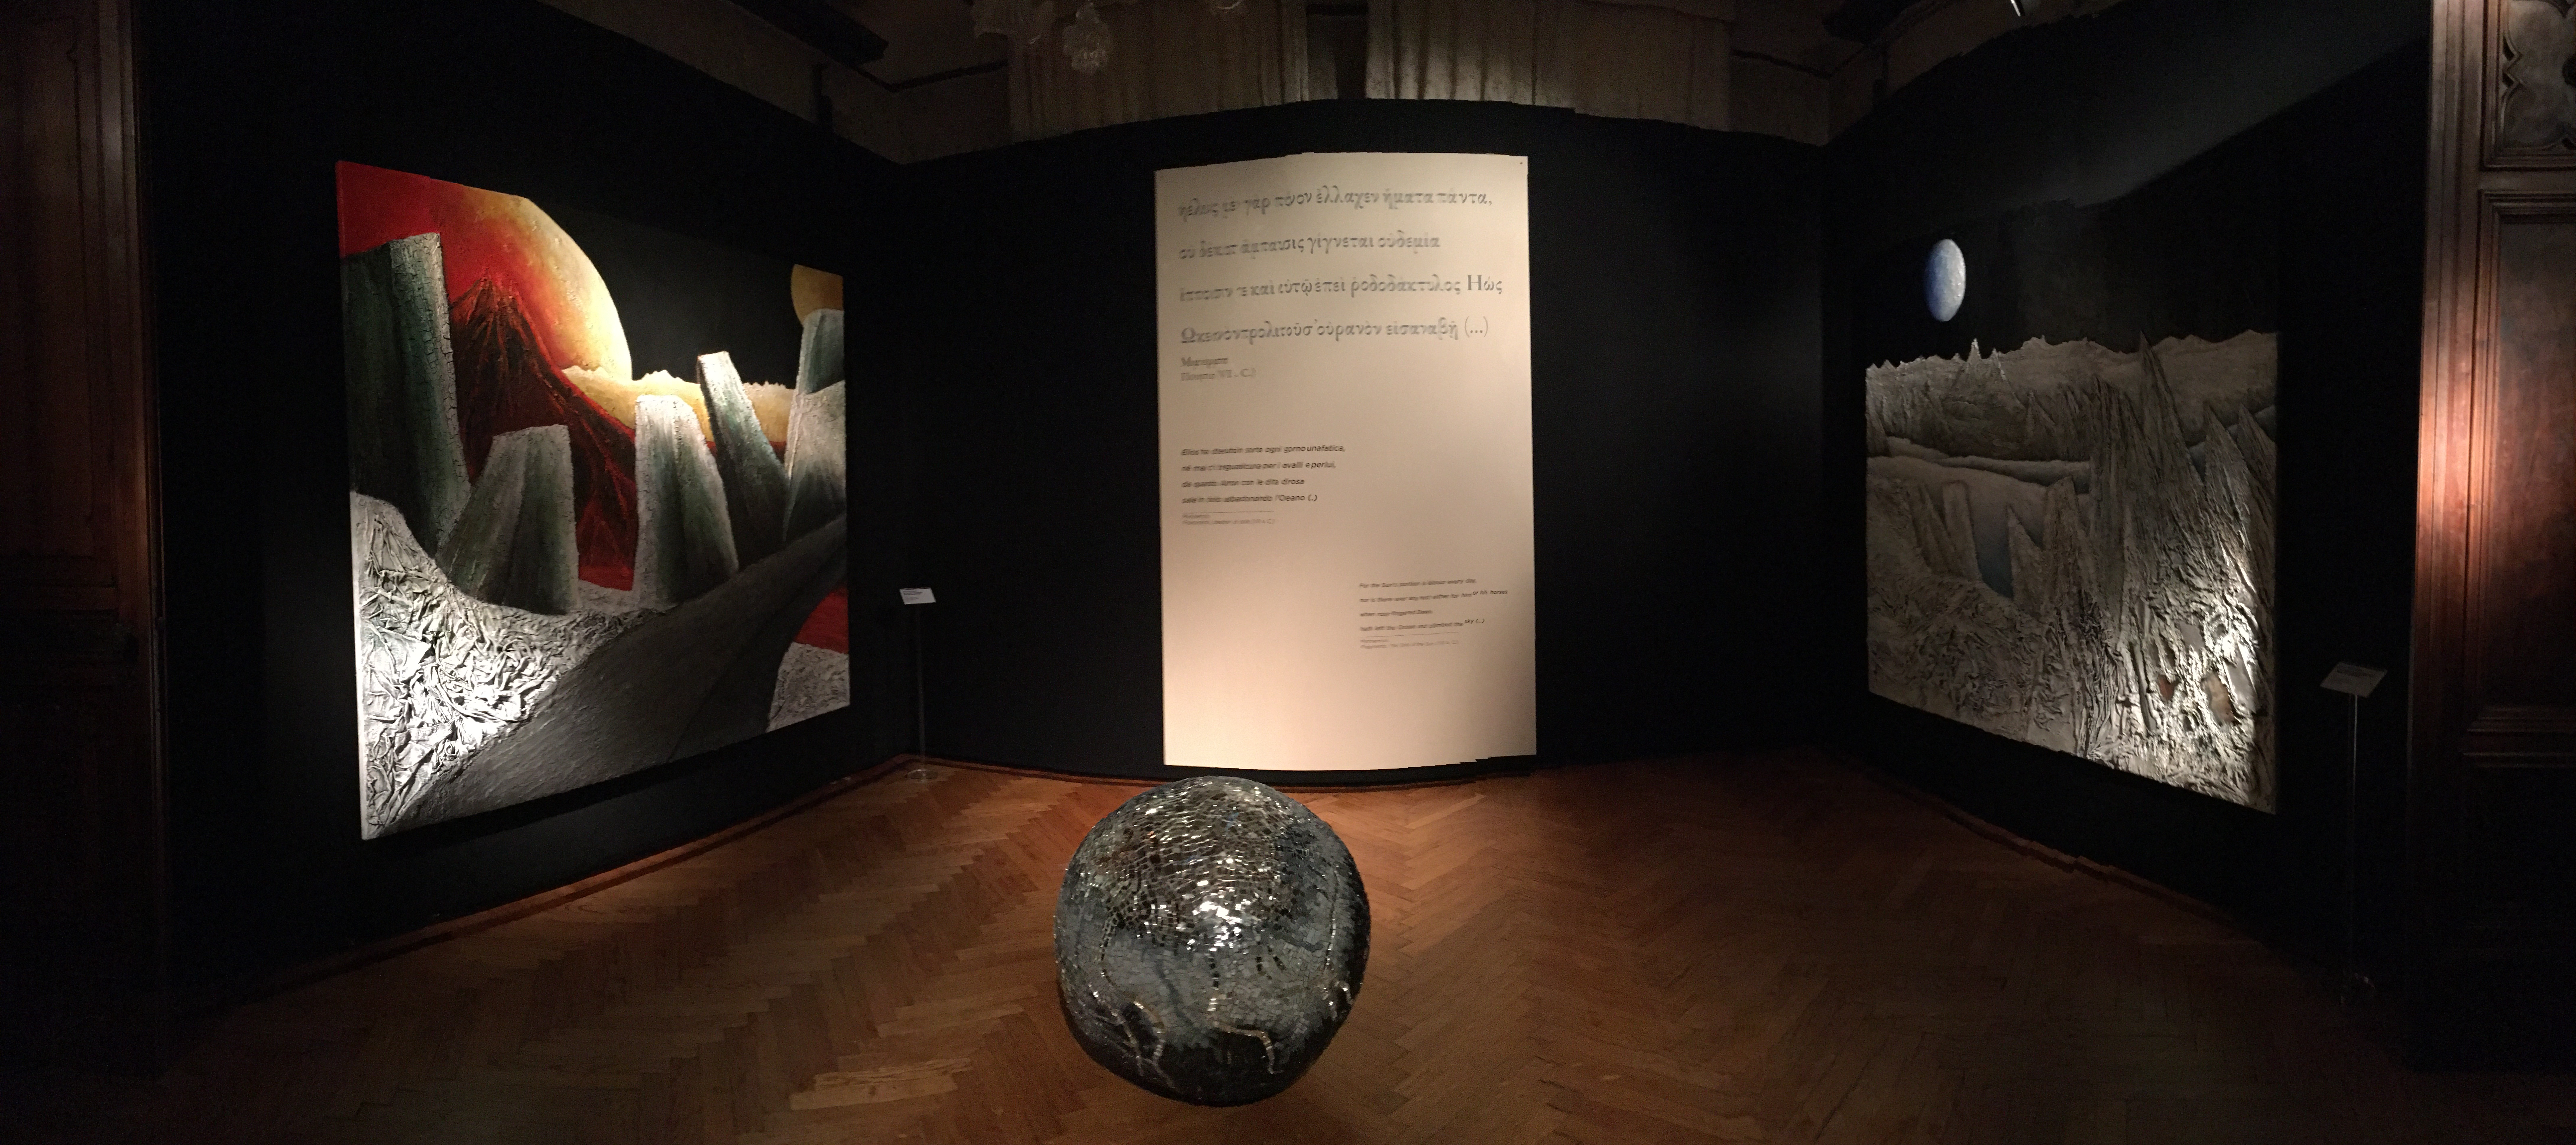

Extrasolar paintings

Mario Paschetta created two paintings for the Hubble travelling exhibition Our Place in Space depicting foreign worlds.

For the first image he uses the colours of Mars mixed with more Earthly hues to suggest that this is a place where once there was life but it has now been crystalised into silent rock. In the second work, which incorporates fragments of solar panels that once powered Hubble, a desolate land of cold, hard colours is shown.

Credit: ESA/Hubble, A. Nota